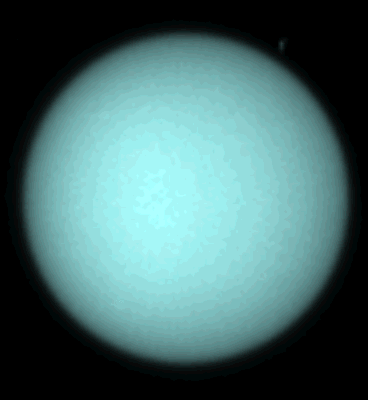

Hubble Spots Northern Hemispheric Clouds On Uranus

This 'aqua' image is taken at 5, 470 Angstroms, which is near the human eye's peak response to wavelength

Credit: Heidi Hammel (Massachusetts Institute of Technology), and NASA/ESA